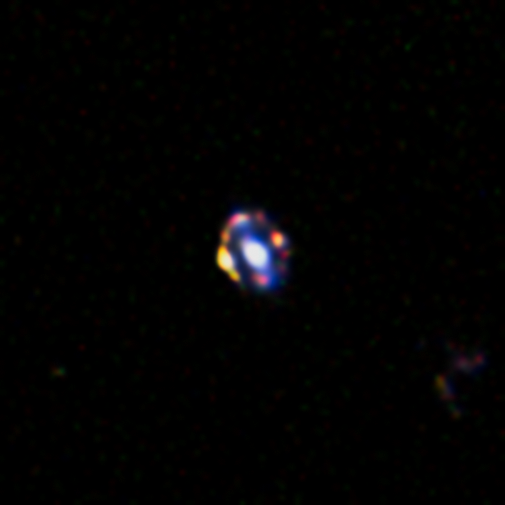

The most distant gravitational lens yet discovered

This picture from the NASA/ESA Hubble Space Telescope shows the most distant gravitational lens yet discovered. The glow at the centre of this picture is the central regions of a normal galaxy. By chance it is precisely aligned with a much more remote, young star-forming galaxy. The light from the more distant object is bent around the nearer object by its strong graviational pull to form a ring of multiple images. The chance of finding such an exact alignment is very small, suggesting that there may be more star-forming galaxies in the early Universe than expected.

Credit: NASA/ESA/A. van der Wel